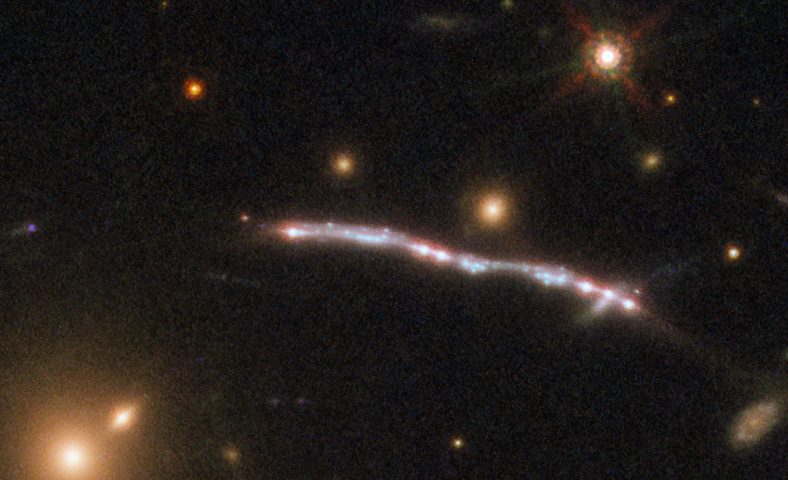

Sunburst Arc 1

This image, taken with the NASA/ESA Hubble Space Telescope, shows one of four arcs formed of the light from the galaxy nicknamed the Sunburst Arc. Created by strong gravitational lensing, this bright arc of light consists of at least six copies of the image of a single galaxy.

Credit: ESA/Hubble, NASA, Rivera-Thorsen et al.